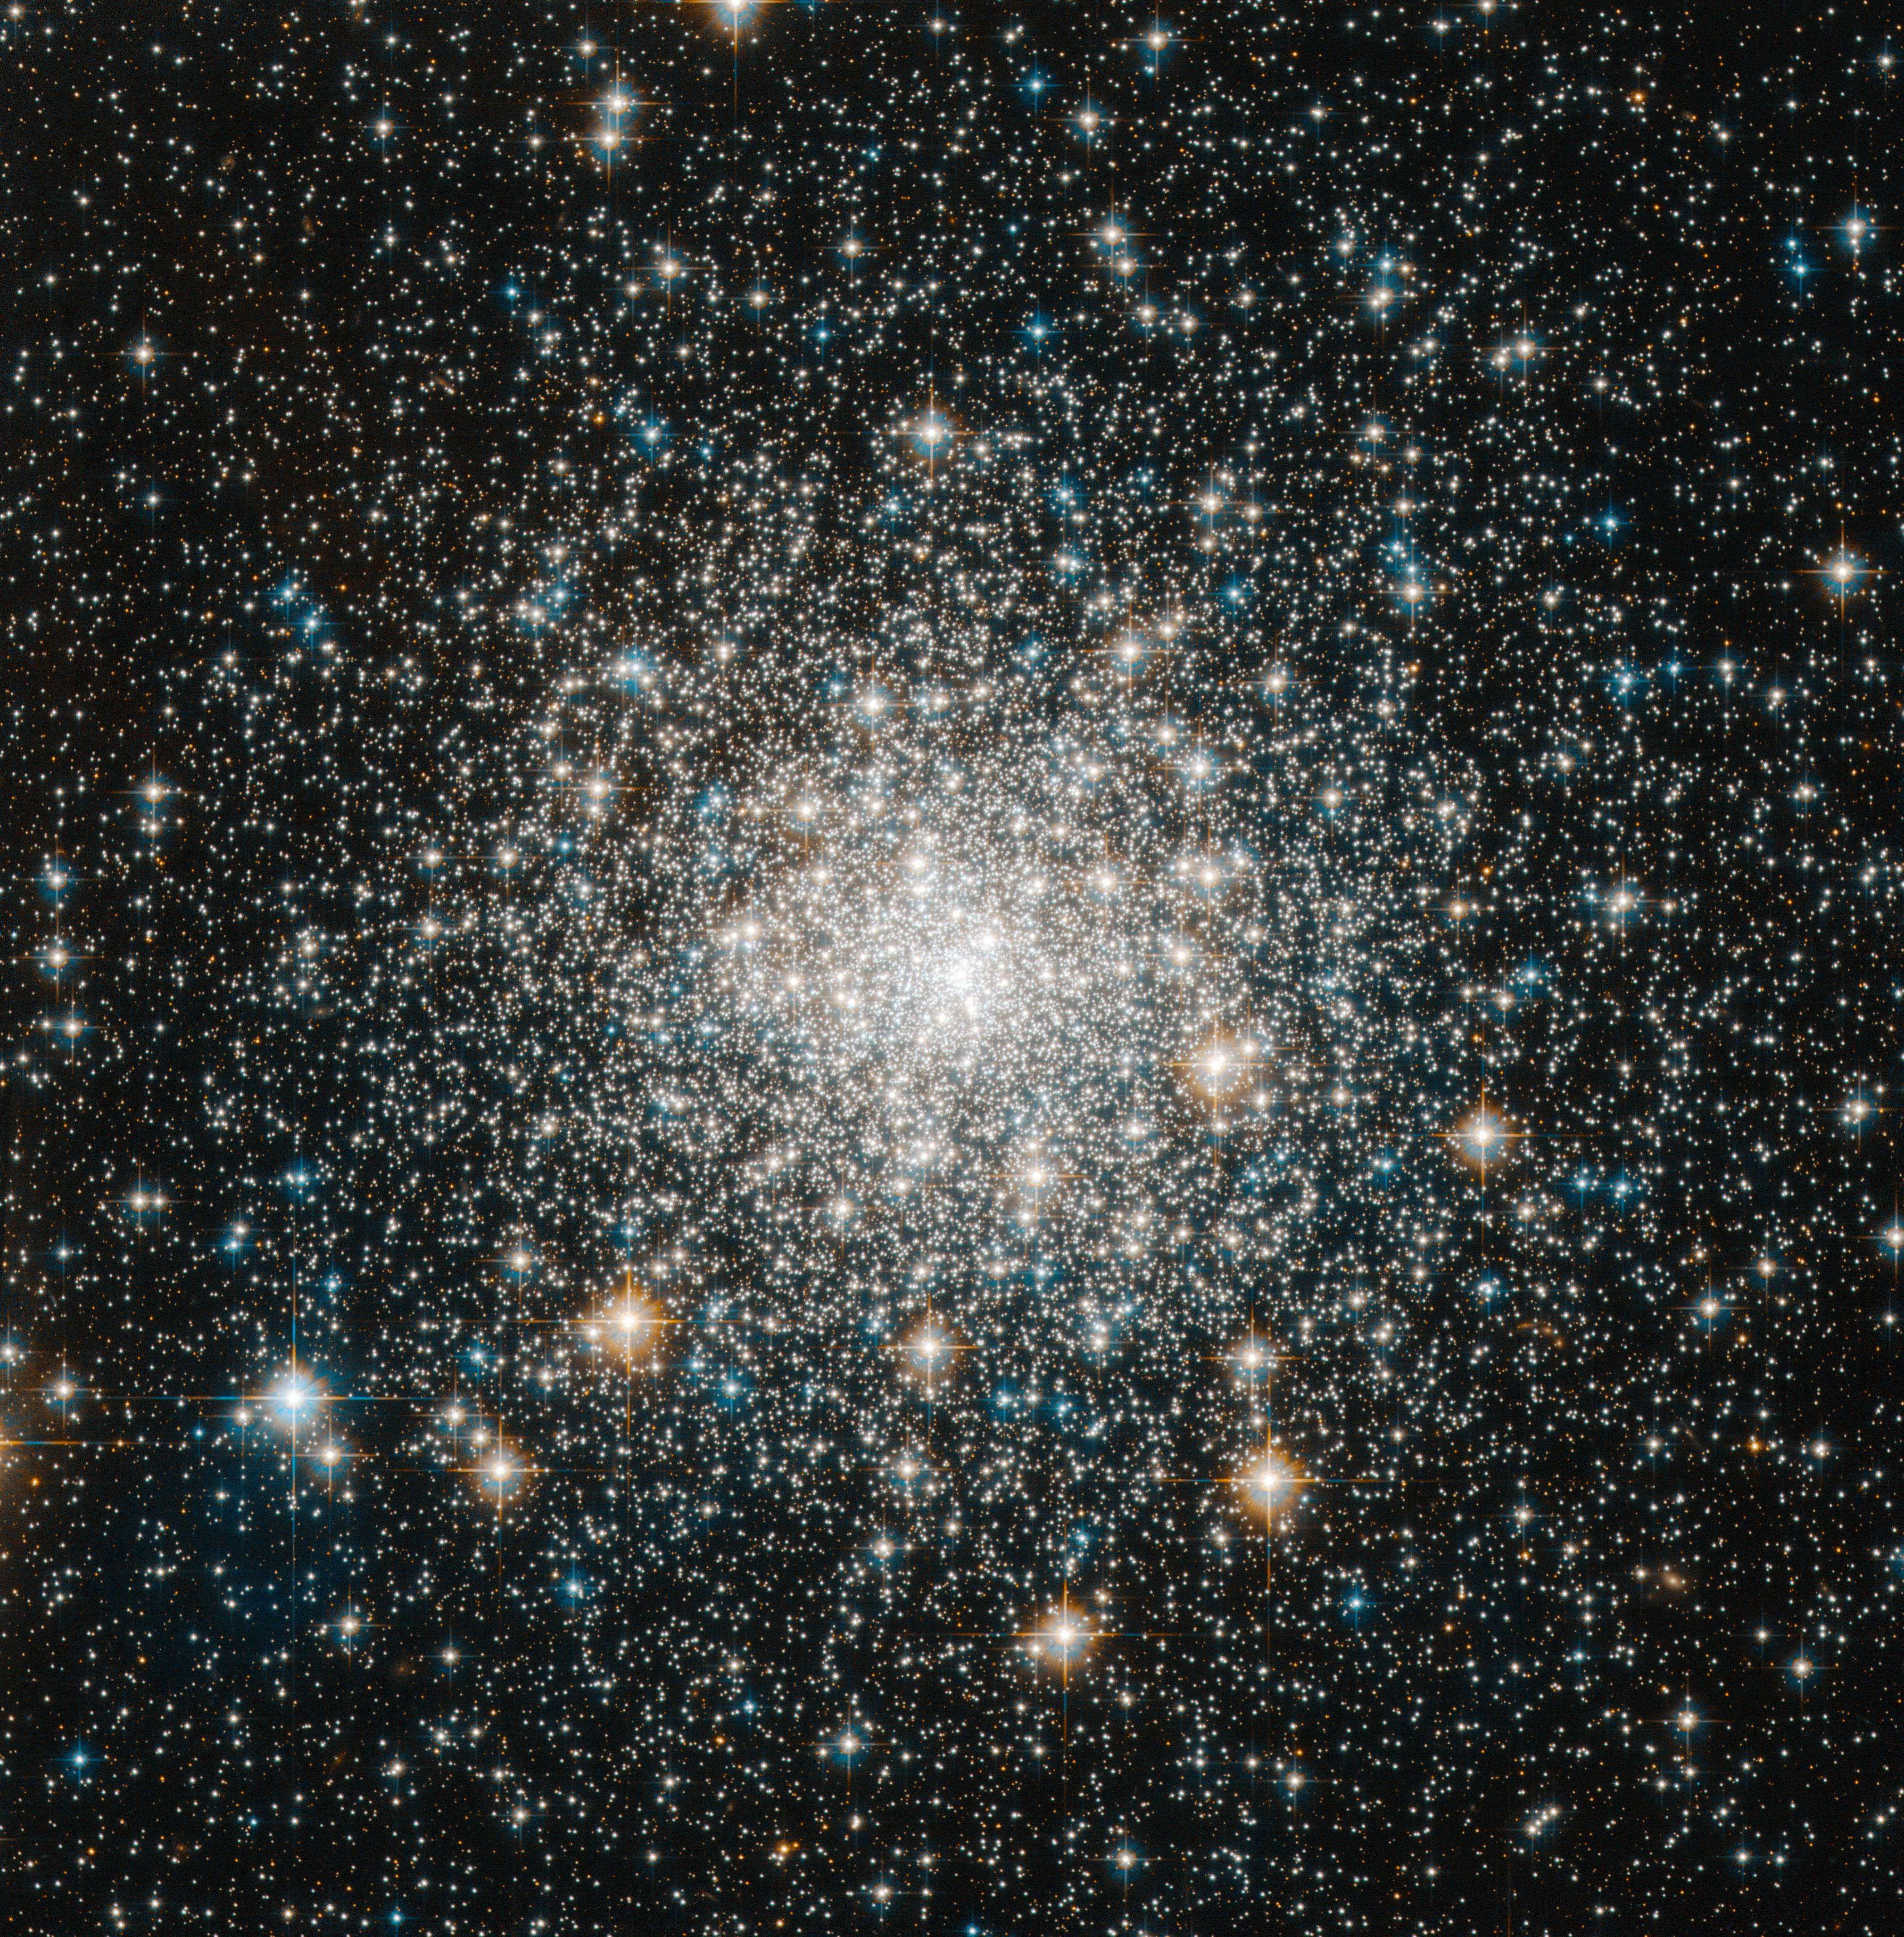

Tight and bright

In this image, the NASA/ESA Hubble Space Telescope has captured the brilliance of the compact centre of Messier 70, a globular cluster. Quarters are always tight in globular clusters, where the mutual hold of gravity binds together hundreds of thousands of stars in a small region of space. Having this many shining stars piled on top of one another from our perspective makes globular clusters a popular target for amateur skywatchers and scientists alike. Messier 70 offers a special case because it has undergone what is known as a core collapse. In these clusters, even more stars squeeze into the object's core than on average, such that the brightness of the cluster increases steadily towards its centre.

The legions of stars in a globular cluster orbit about a shared centre of gravity. Some stars maintain relatively circular orbits, while others loop out into the cluster's fringes. As the stars interact with each other over time, lighter stars tend to pick up speed and migrate out toward the cluster's edges, while the heavier stars slow and congregate in orbits toward the centre. This huddling effect produces the denser, brighter centres characteristic of core-collapsed clusters. About a fifth of the more than 150 globular clusters in the Milky Way have undergone a core collapse.

Although many globular clusters call the galaxy's edges home, Messier 70 orbits close to the Milky Way's centre, around 30 000 light-years away from the Solar System. It is remarkable that Messier 70 has held together so well, given the strong gravitational pull of the Milky Way's hub.

Messier 70 is only about 68 light-years in diameter and can be seen, albeit very faintly, with binoculars in dark skies in the constellation of Sagittarius (The Archer). French astronomer Charles Messier documented the object in 1780 as the seventieth entry in his famous astronomical catalogue.

This picture was obtained with the Wide Field Camera of Hubble’s Advanced Camera for Surveys. The field of view is around 3.3 by 3.3 arcminutes.

Credit: ESA/Hubble & NASA